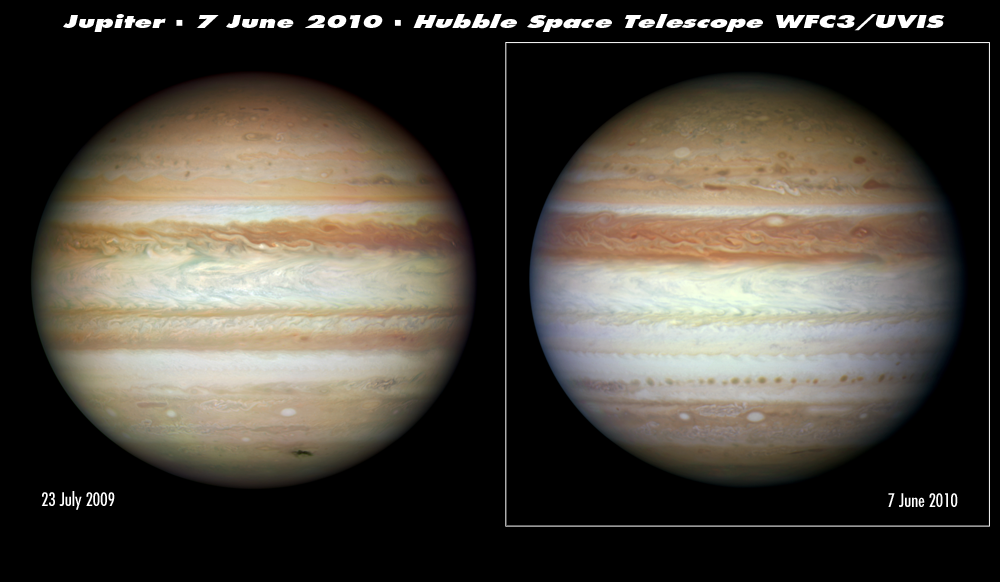

Hubble sees Jupiter change its stripes

The giant and stormy planet Jupiter has gone through a makeover, as seen in these comparative NASA/ESA Hubble Space Telescope images taken nearly 11 months apart. Several months ago the dark Southern Equatorial Belt vanished. The last time this happened was in the early 1970s, when we didn’t have powerful enough telescopes to study the change in detail.

Left
A Hubble picture from 23 July 2009 captures the planet’s familiar appearance from the past several decades with alternating zones of high altitude ammonia ice crystal clouds (white strips) and belts of lower altitude material (dark strips). The image was taken to study a wispy patch of dark debris in the far southern hemisphere caused by the suspected explosion of an asteroid plunging into the lower atmosphere on 19 July 2009.

Right
A Hubble picture from 7 June 2010 reveals a slightly higher altitude layer of white ammonia ice crystal clouds that appears to obscure the deeper, darker belt clouds of the Southern Equatorial Belt. The team predicts that these clouds should clear out in a few months.

Hubble also resolved a string of dark spots further south of the vanished belt. Based on past observations, the Hubble Jupiter team expects to see similar spots appear in the Southern Equatorial Belt, right before the white clouds clear out in a few months.

These natural colour comparative planet portraits were taken in visible light with Hubble’s new Wide Field Camera 3.

Credit: NASA, ESA, M. H. Wong (University of California, Berkeley, USA), H. B. Hammel (Space Science Institute, Boulder, Colorado, USA), A. A. Simon-Miller (Goddard Space Flight Center, Greenbelt, Maryland, USA) and the Jupiter Impact Science Team.